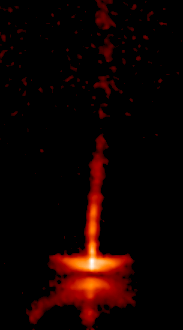

The dynamic HH-30 disk and jet (Frame 1)

This is how HH-30 looked in 1995.

Credit: NASA, Alan Watson (Universidad Nacional Autonoma de Mexico), Karl Stapelfeldt (Jet Propulsion Laboratory), John Krist and Chris Burrows (European Space Agency/ Space Telescope Science Institute).